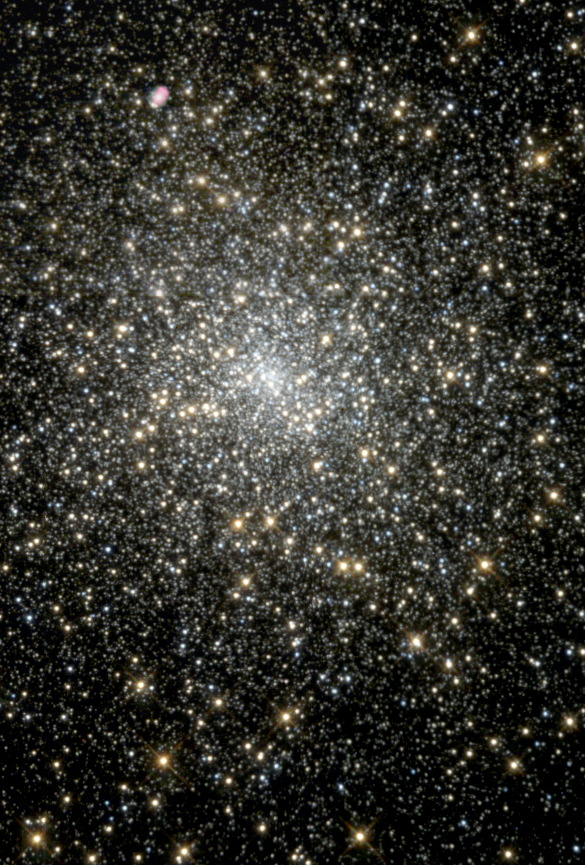

Where Did That Black Hole Come From?

Medium-size black holes actually do exist, according to the latest findings from the NASA/ESA Hubble Space Telescope, but scientists had to look in some unexpected places to find them. The previously undiscovered black holes provide an important link that sheds light on the way in which black holes grow. Even more odd, these new black holes were found in the cores of glittering, 'beehive' swarms of stars called globular star clusters, which orbit our Milky Way and other galaxies.

The black hole in globular cluster M15 is 4, 000 times more massive than our Sun.

Credit: NASA/ESA and The Hubble Heritage Team (STScI/AURA)